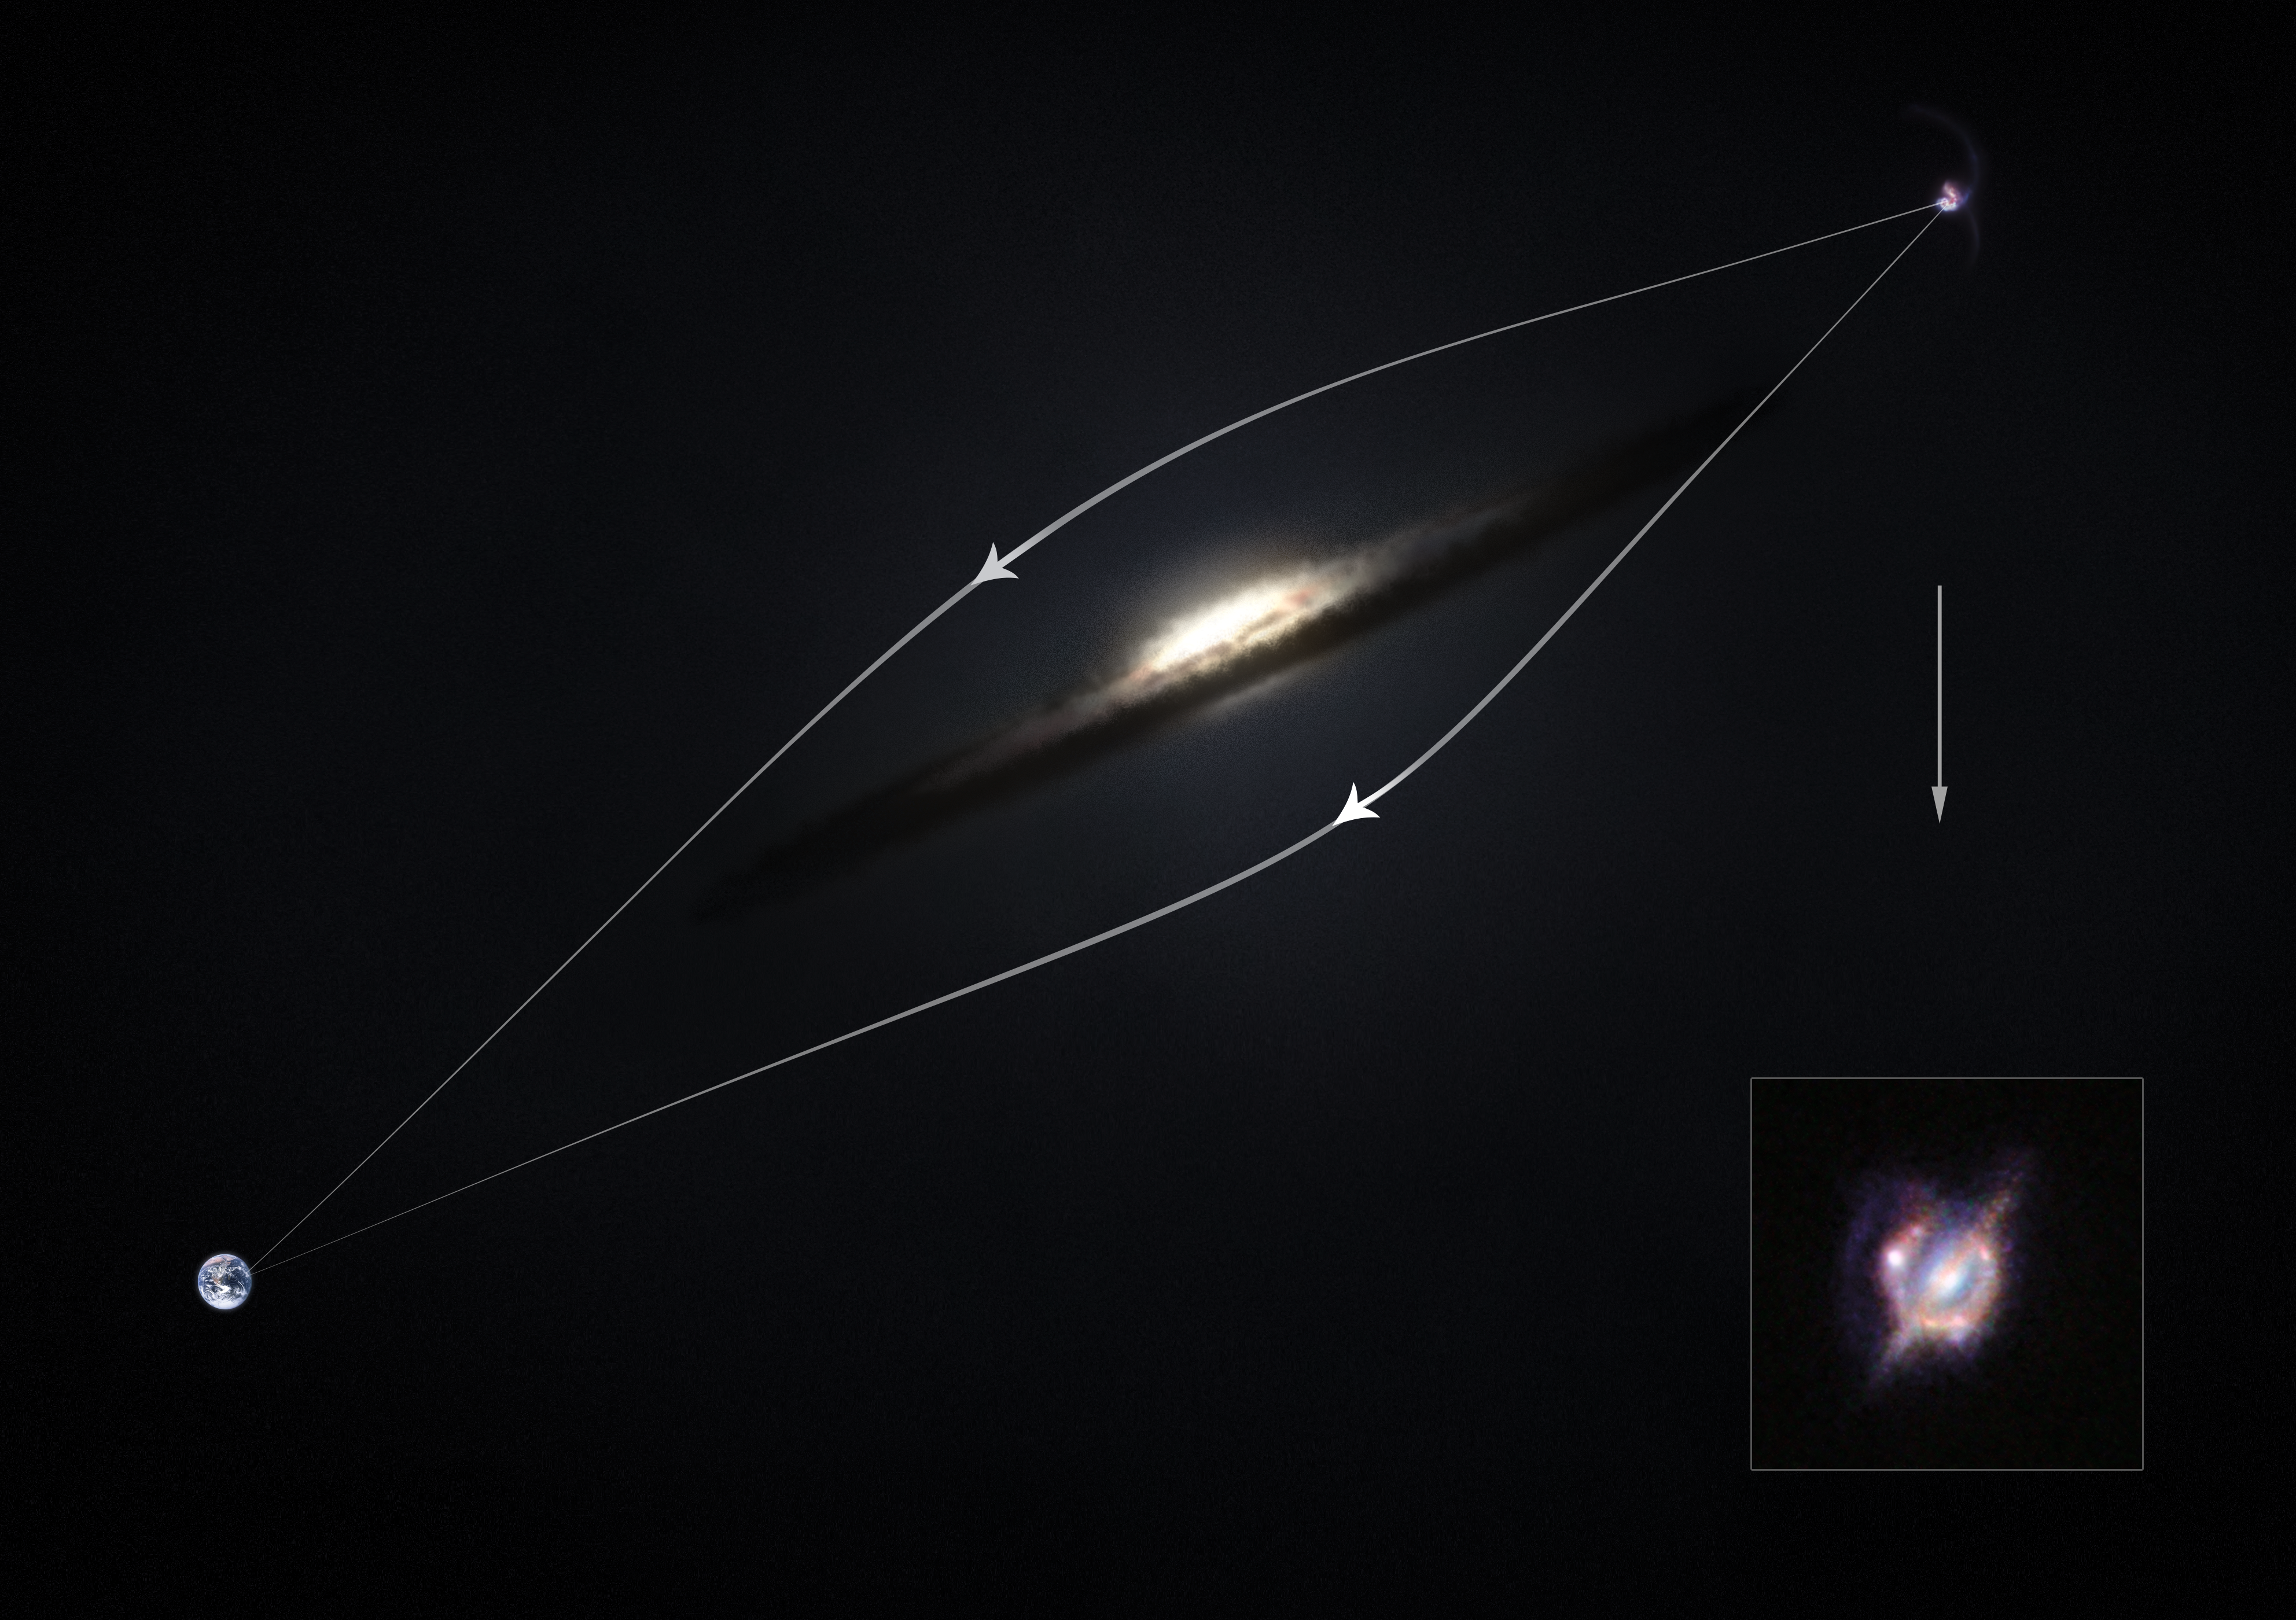

How gravitational lensing acts as a magnifying glass — diagram

This diagram shows how the effect of gravitational lensing around a normal galaxy focuses the light coming from a very distant star-forming galaxy merger to created a distorted, but brighter view.

The NASA/ESA Hubble Space Telescope and many other telescopes on the ground and in space have enlisted the help of a galaxy-sized magnifying glass to reveal otherwise invisible detail and obtain the best view yet of a collision that took place between two galaxies when the Universe was only half its current age. The image showing these combined observations can be seen in the inset.

These new studies of the galaxy H-ATLAS J142935.3-002836 have shown that this complex and distant object looks surprisingly like the well-known local galaxy collision, the Antennae Galaxies.

Credit: ESA/ESO/M. Kornmesser